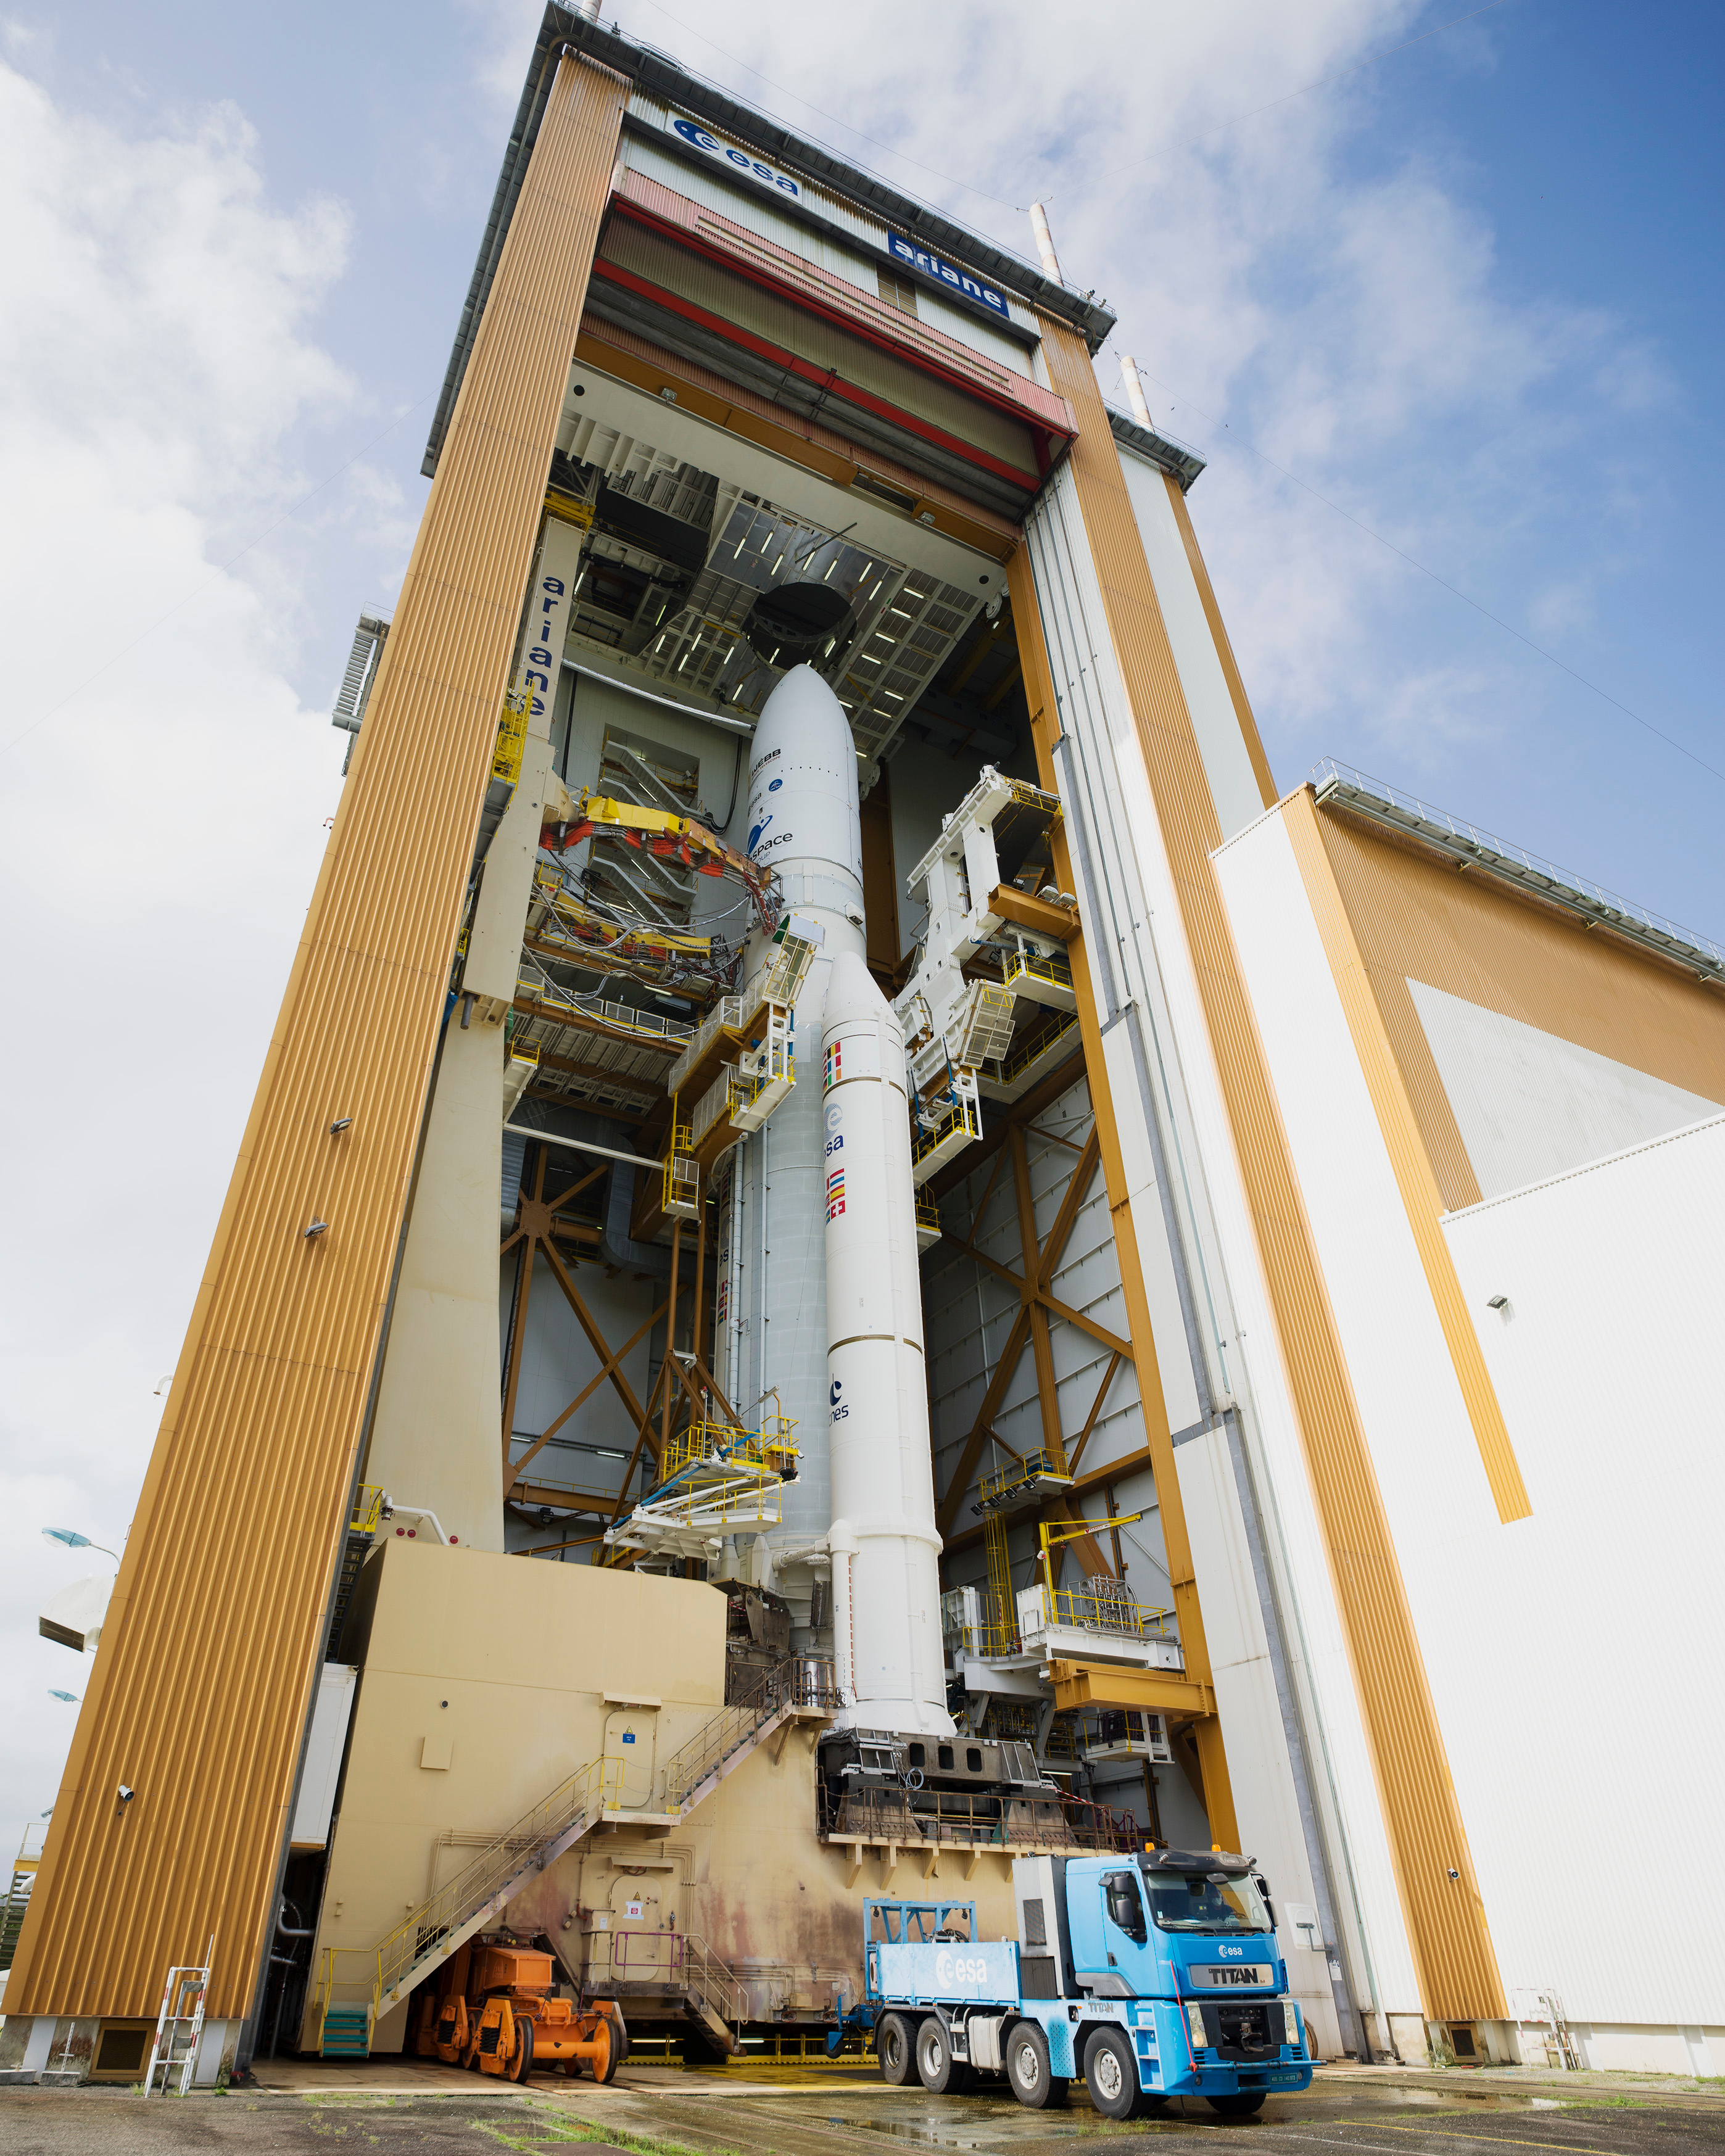

Ariane 5 with James Webb Space Telescope Prelaunch

NASA’s James Webb Space Telescope has begun its stately rollout to the Arianespace ELA-3 launch complex at Europe’s Spaceport located near Kourou, French Guiana. Arianespace and NASA will closely monitor the vitals of Webb and the Ariane 5 rocket during the nearly two-hour process. Webb is scheduled for liftoff at 7:20 am EST Saturday, Dec. 25.

Credit: NASA/Chris Gunn